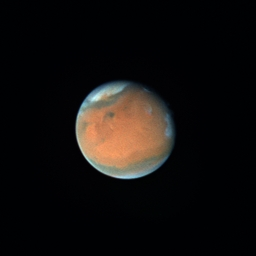

Dust Storms on Mars (September 18th, 1996)

The salmon colored notch in the white north polar cap is a 600-mile (1, 000 kilometer) long storm - nearly the width of Texas!

This image was taken when Mars was more than 186 million miles (300 million kilometers) from Earth, and the planet was smaller in angular size than Jupiter's Great Red Spot!

Credit: Phil James (University of Toledo), Steve Lee (University of Colorado) and NASA/ESA